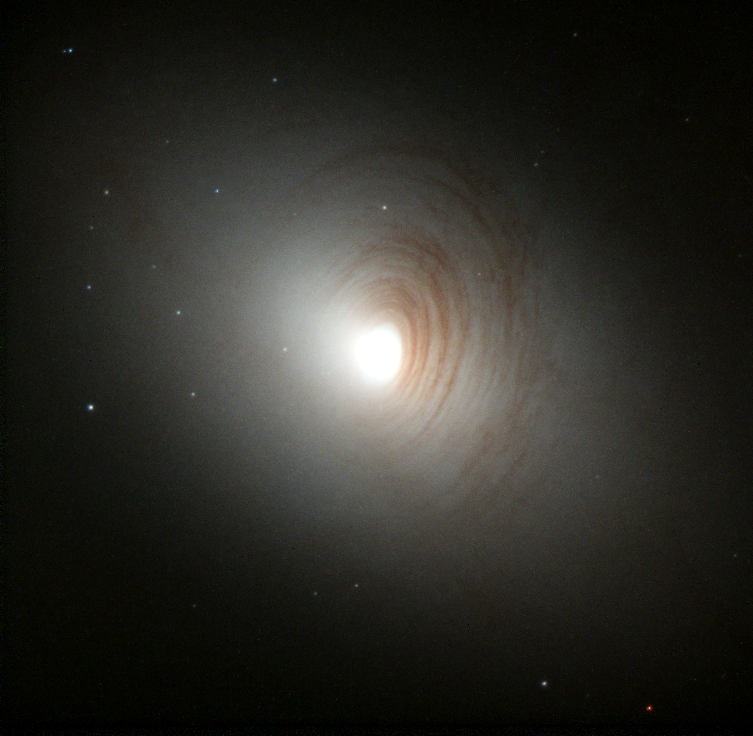

Galaxy NGC 2787

Tightly wound, almost concentric, arms of dark dust encircle the bright nucleus of the otherwise nondescript galaxy, NGC 2787, in this image created by the Hubble Heritage team. Astronomer Marcella Carollo (Swiss Federal Institute of Technology, Zurich) and collaborators used Hubble's Wide Field Planetary Camera 2 to collect the data in January 1999.

Credit: NASA/ESA and The Hubble Heritage Team